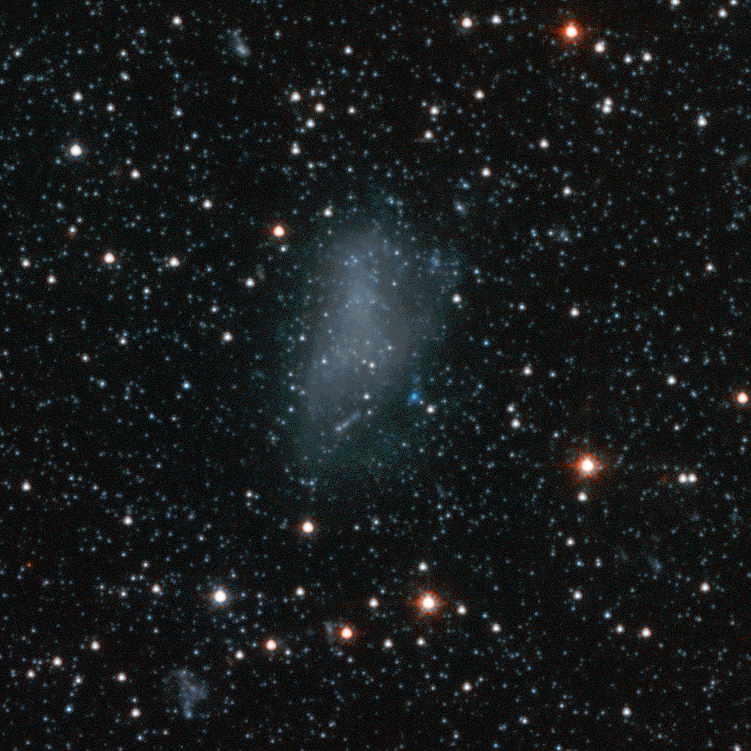

Andromeda Galaxy Halo Details - 5

Relying on the deepest visible-light images ever taken in space, astronomers using NASA's Hubble Space Telescope (HST) have reliably measured the age of the spherical halo of stars surrounding the neighboring Andromeda galaxy (M31). To their surprise, they have discovered that approximately one-third of the stars in Andromeda's halo formed only 6 to 8 billion years ago. That's a far cry from the 11-to-13 billion-year age of the stars in the Milky Way's halo.

Credit: NASA, ESA and T.M. Brown (STScI)